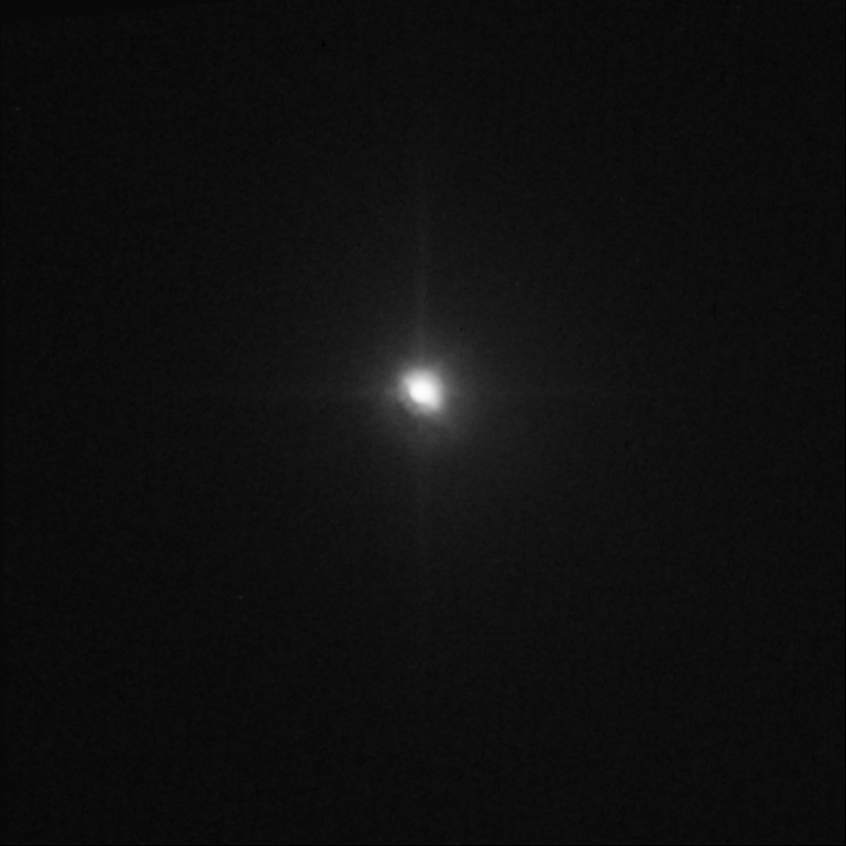

Hubble captures Deep Impact's collision with a comet (view 12 minutes after impact)

This image shows that just 12 minutes after the collision, the innermost coma of dust appears 10 times brighter than in the pre-impact photo. The impact caused a brilliant flash of light and a constant increase in the brightness of the inner cloud of dust.

Credit: NASA, ESA, P. Feldman (Johns Hopkins University), and H. Weaver (Johns Hopkins University Applied Physics Lab)